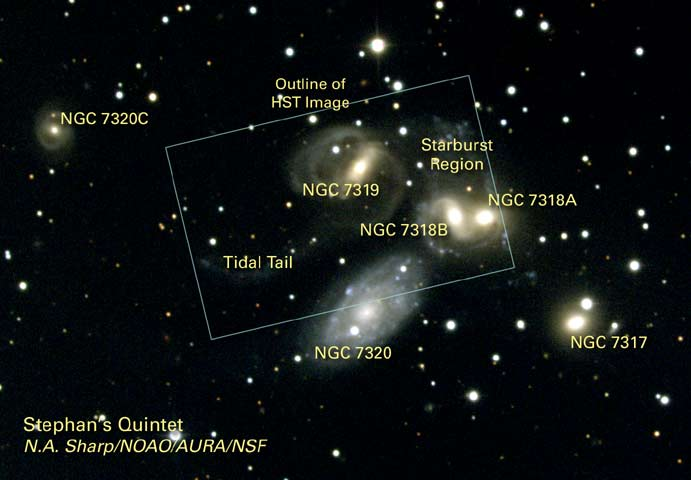

Outline of the HST Image of Stephan's Quintet

This illustration shows the outline of the HST image of Stephans' Quintet.

Credit: Nigel Sharp (NOAO/AURA/NSF)